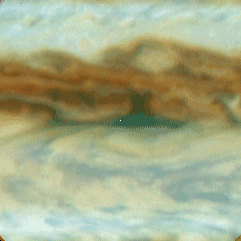

Galileo Probe Entry Site on Jupiter

This is one out of four enlarged Hubble images of Jupiter's equatorial region and it shows clouds sweeping across the predicted Galileo probe entry site, which is at the exact center of each frame (a small white dot has been inserted at the centered at the predicted entry site).

Credit: Reta Beebe (New Mexico State University), and NASA/ESA